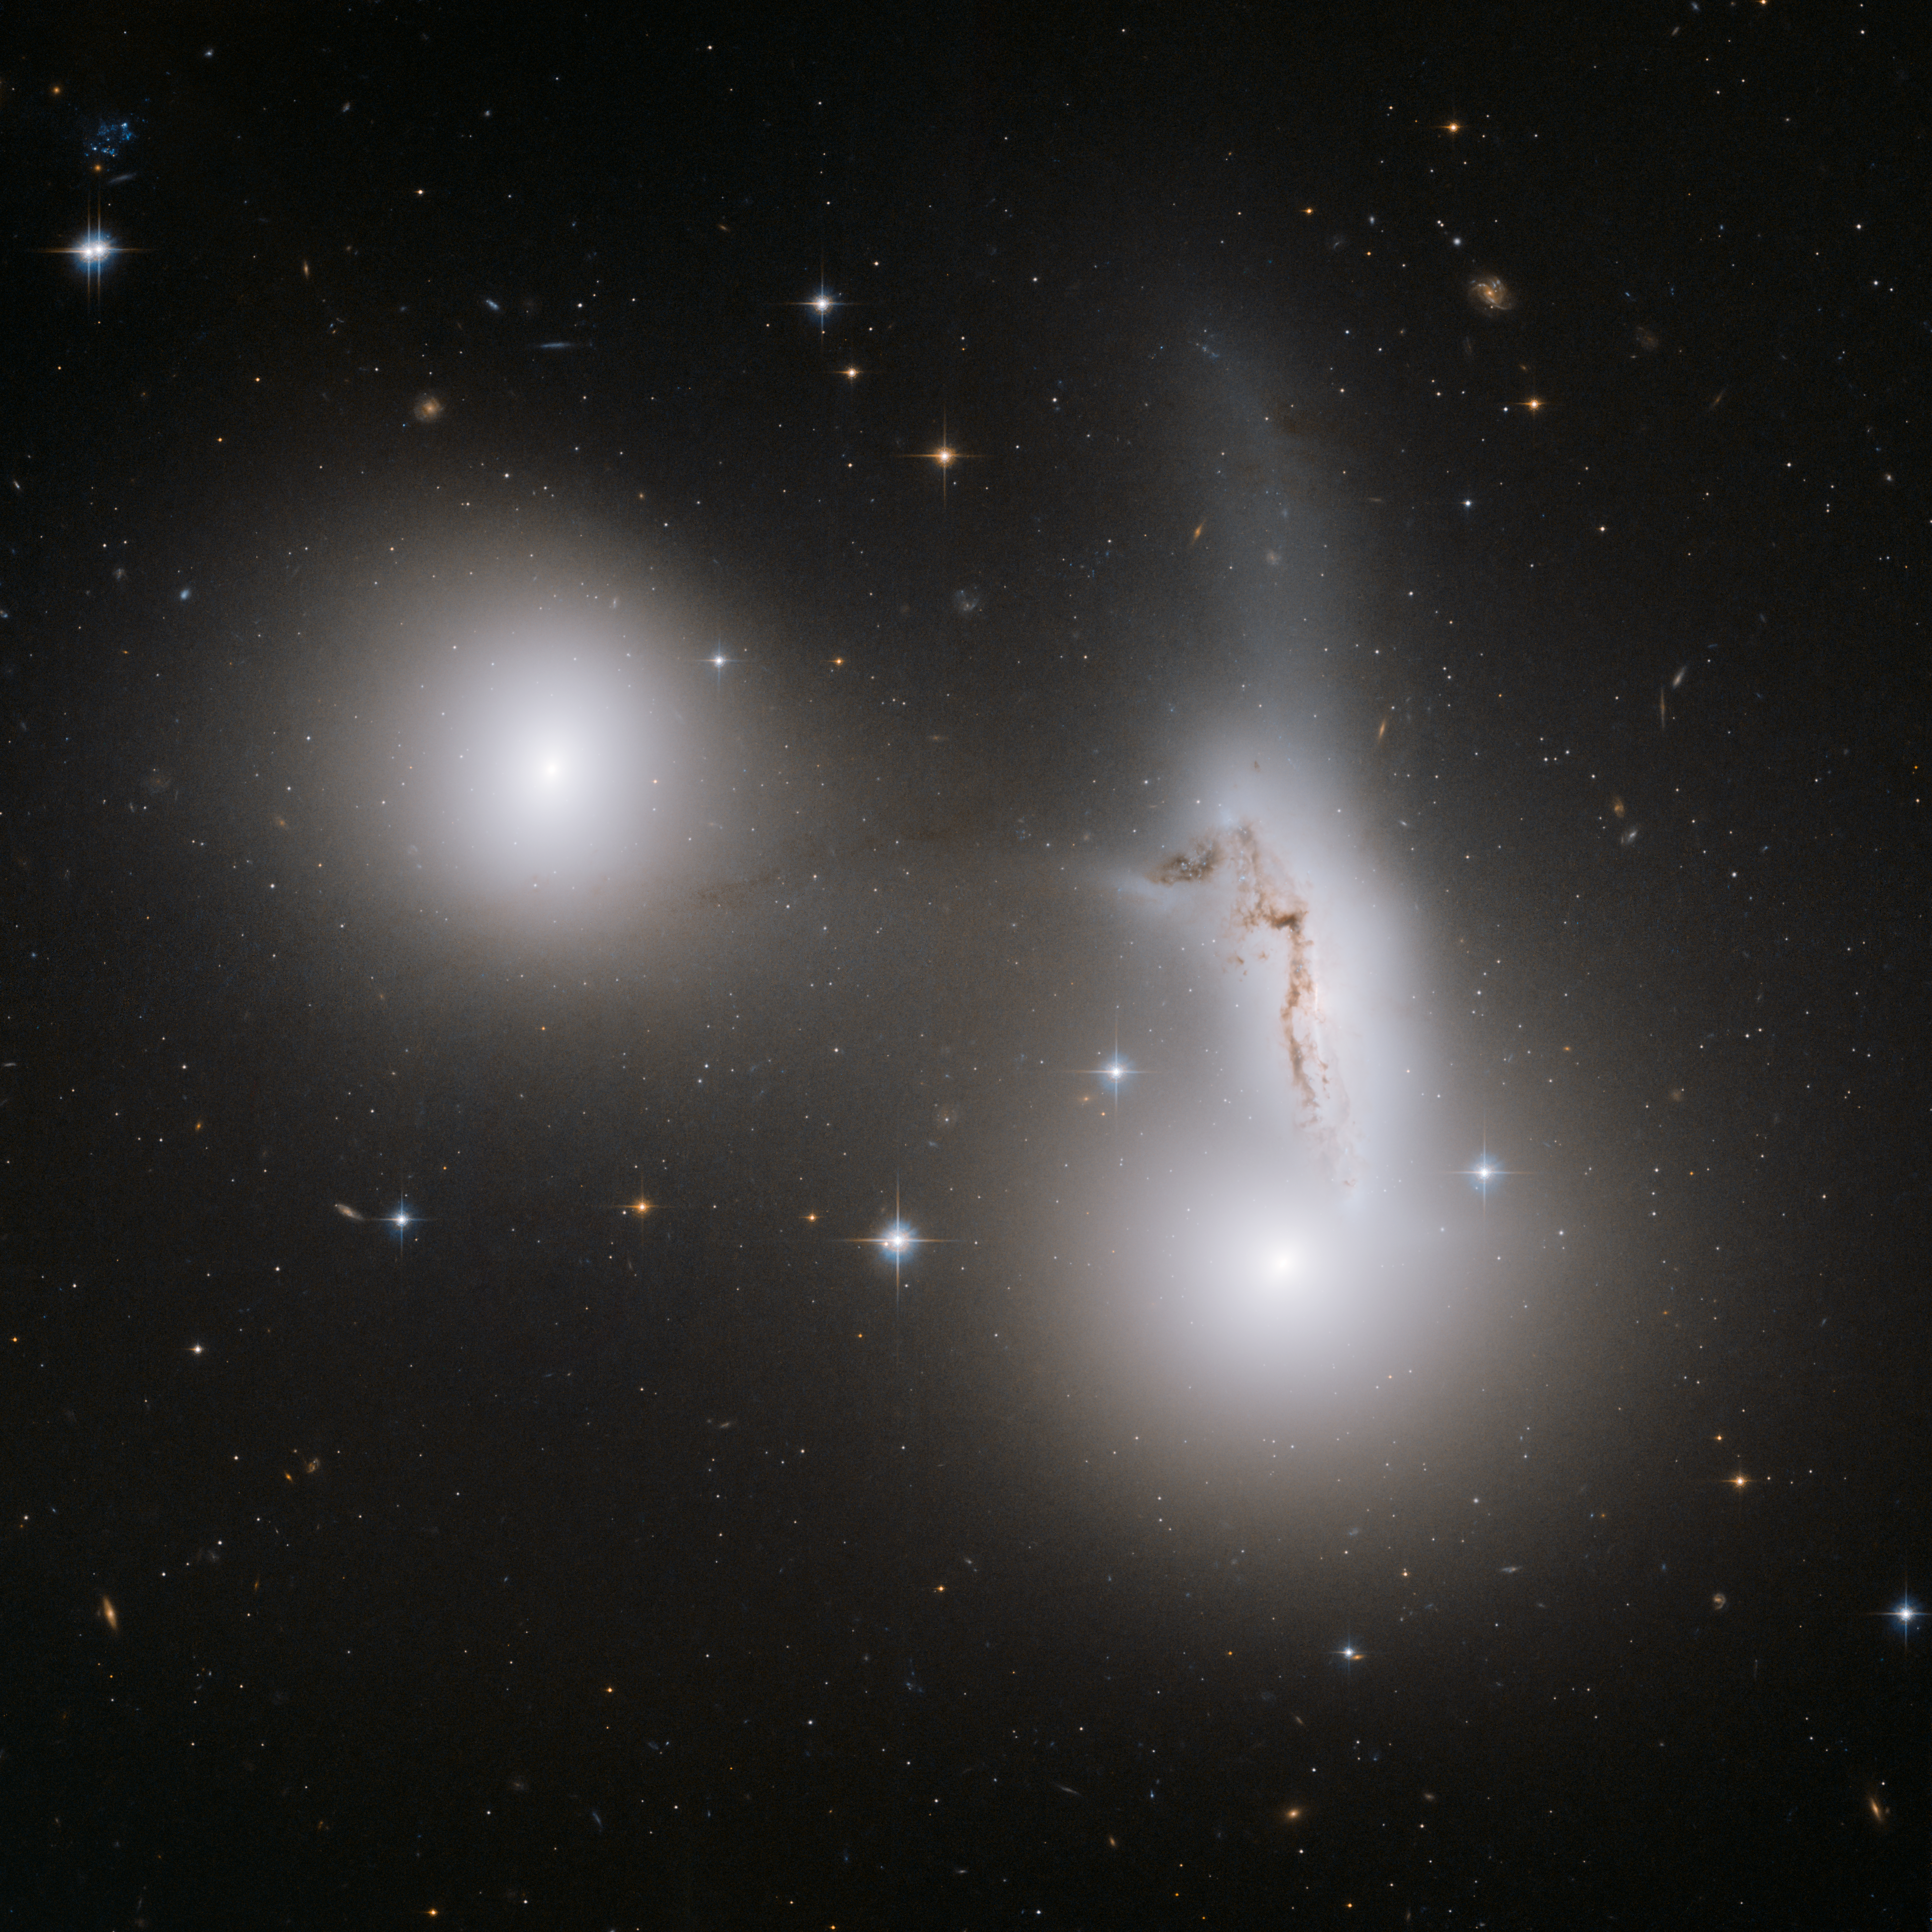

Trio of galaxies mixes it up

The three pictured galaxies - NGC 7173 (middle left), NCG 7174 (middle right) and NGC 7176 (lower right) - are part of the Hickson Compact Group 90, named after astronomer Paul Hickson, who first catalogued these small clusters of galaxies in the 1980s. NGC 7173 and NGC 7176 appear to be smooth, normal elliptical galaxies without much gas and dust. In stark contrast, NGC 7174 is a mangled spiral galaxy, barely clinging to independent existence as it is ripped apart by its close neighbours. The strong tidal interaction surging through the galaxies has dragged a significant number of stars away from their home galaxies. These stars are now spread out, forming a tenuous luminous component in the galaxy group.

Credit: NASA, ESA and R. Sharples (University of Durham, U.K.)